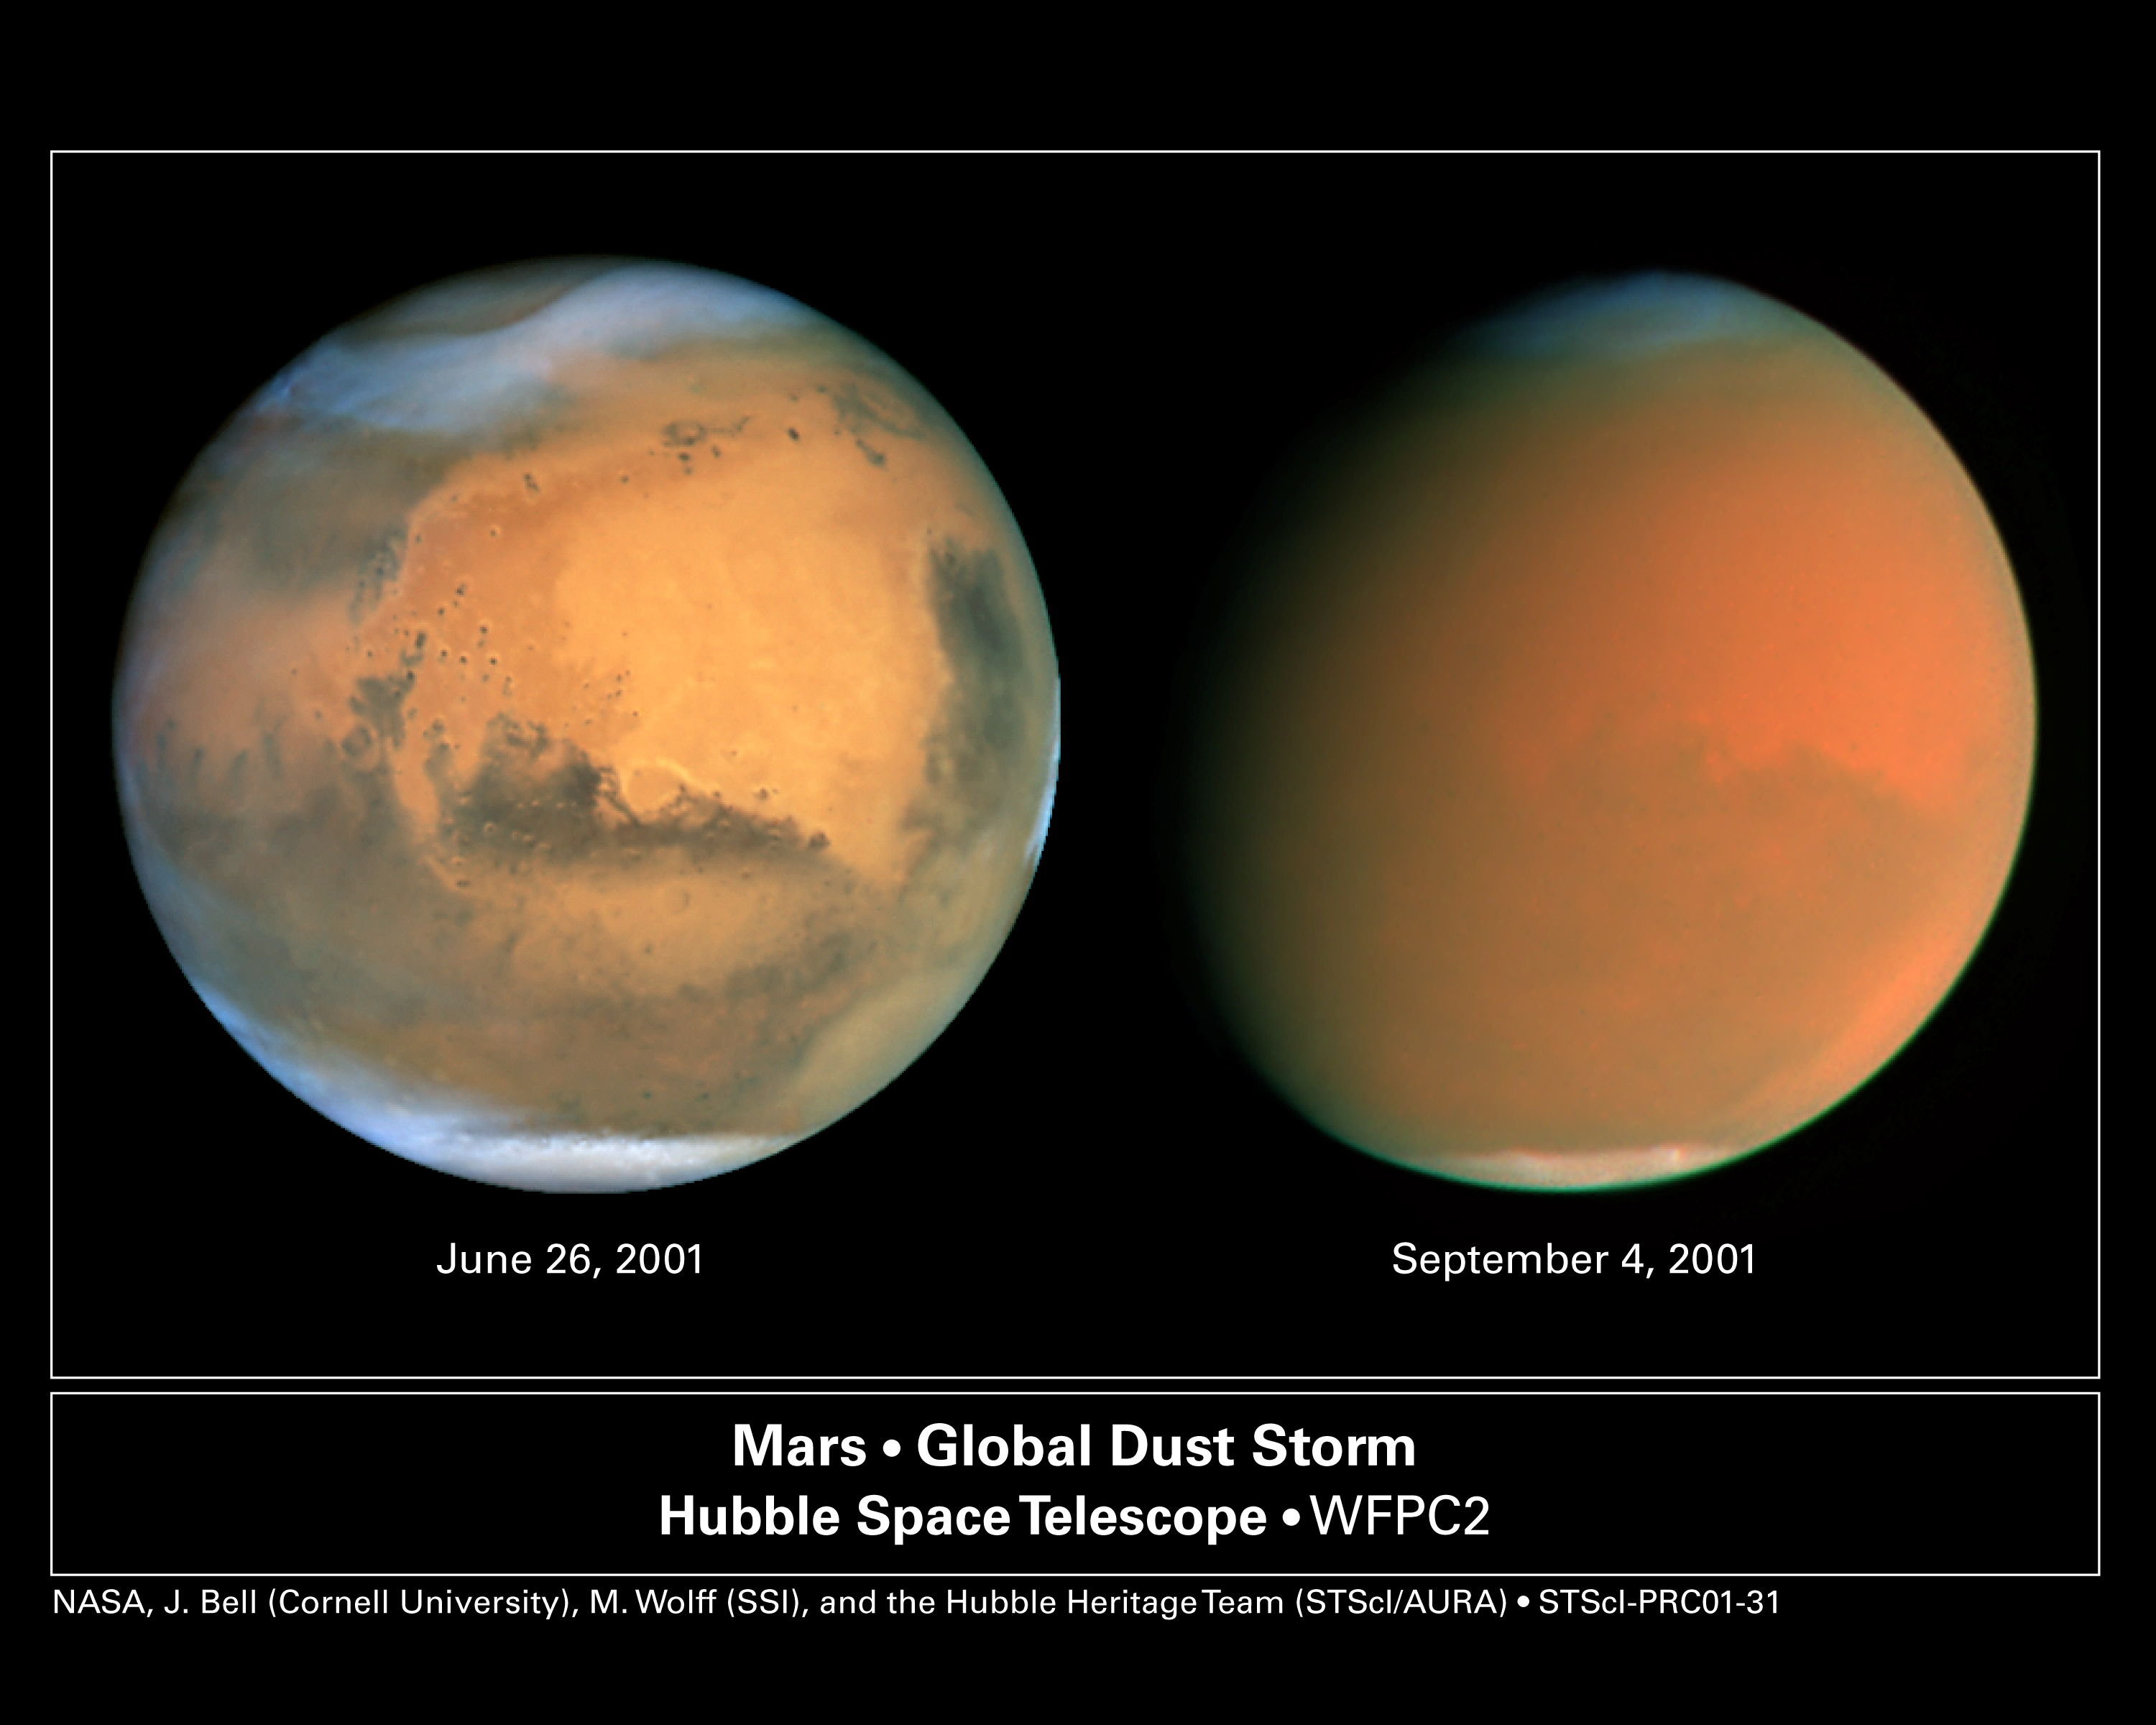

A Perfect Storm

A pair of eagle-eyed spacecraft - the NASA Mars Global Surveyor (MGS) and NASA/ESA Hubble Space Telescope - are giving amazed astronomers a ringside seat to the biggest global dust storm seen on Mars in several decades. The Martian dust storm, larger by far than any seen on Earth, has raised a cloud of dust that has engulfed the entire planet for several months.

Credit: NASA/ESA, James Bell (Cornell Univ.), Michael Wolff (Space Science Inst.), and the Hubble Heritage Team (STScI/AURA)